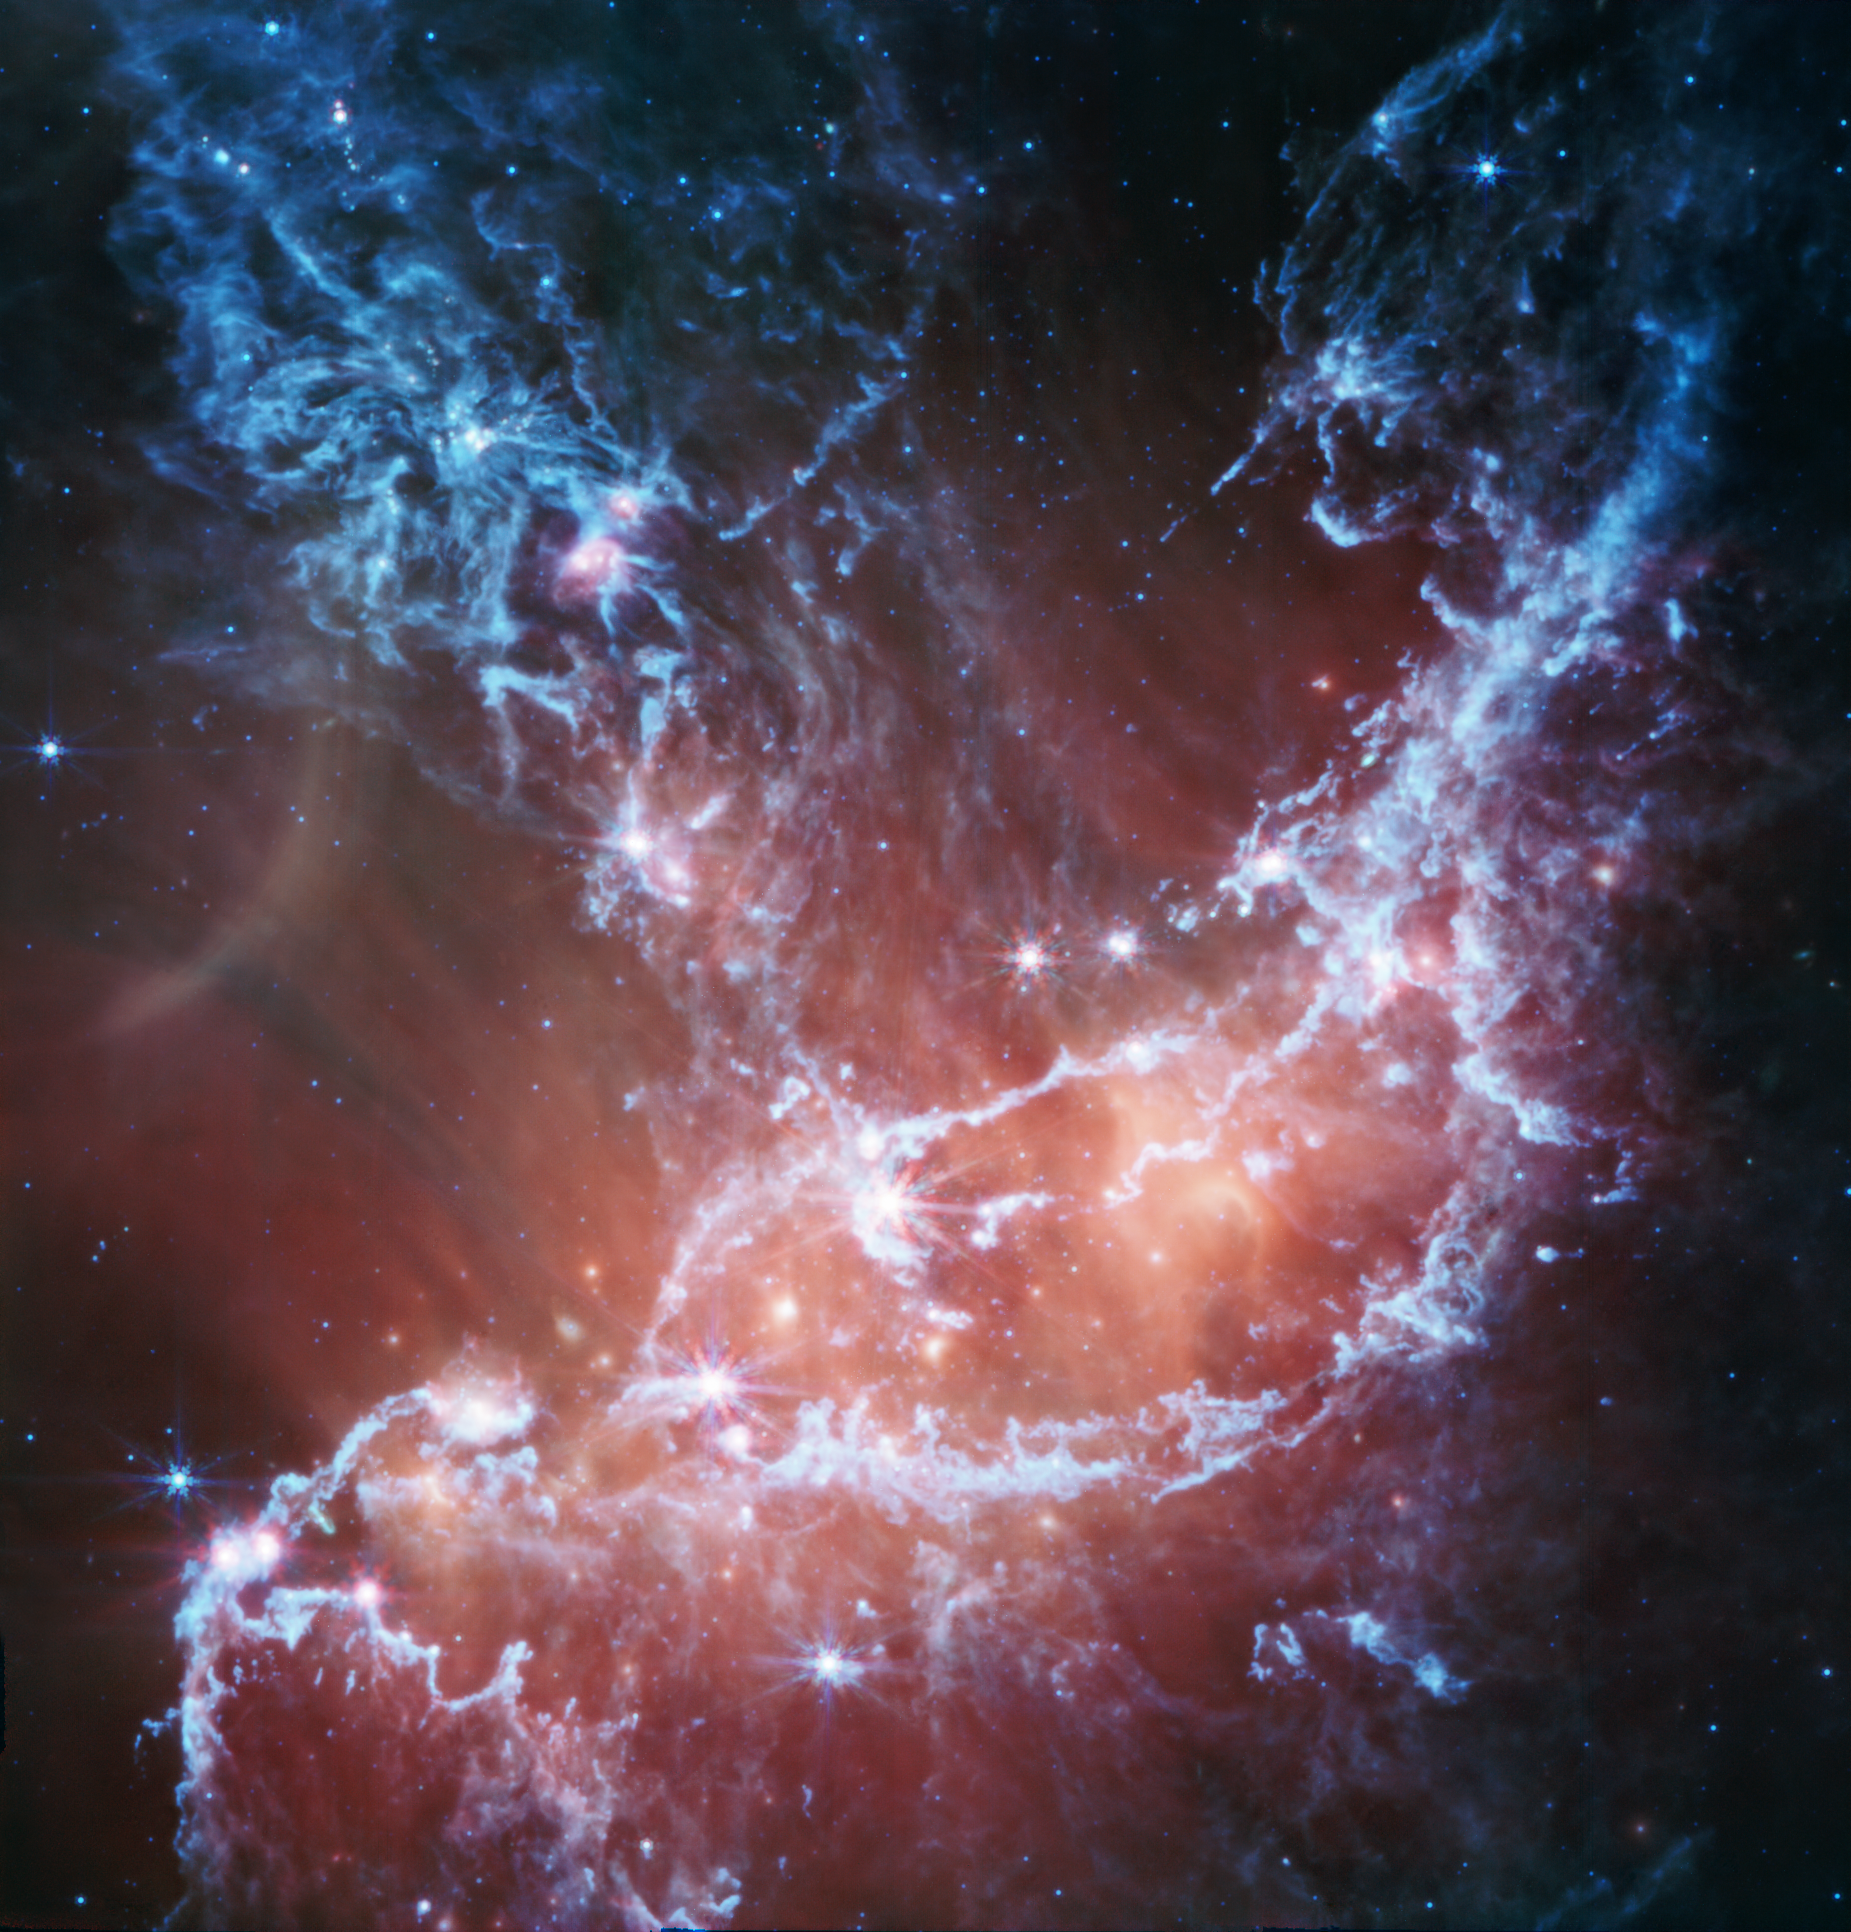

NGC 346 (MIRI image)

This new infrared image of NGC 346 from the NASA/ESA/CSA James Webb Space Telescope’s Mid-Infrared Instrument (MIRI) traces emission from cool gas and dust. In this image blue represents silicates and sooty chemical molecules known as polycyclic aromatic hydrocarbons, or PAHs. More diffuse red emission shines from warm dust heated by the brightest and most massive stars in the heart of the region. Bright patches and filaments mark areas with abundant numbers of protostars.

This image includes 7.7-micron light shown in blue, 10 microns in cyan, 11.3 microns in green, 15 microns in yellow, and 21 microns in red (770W, 1000W, 1130W, 1500W, and 2100W filters, respectively).

Credit: NASA, ESA, CSA, N. Habel (JPL), P. Kavanagh (Maynooth University)